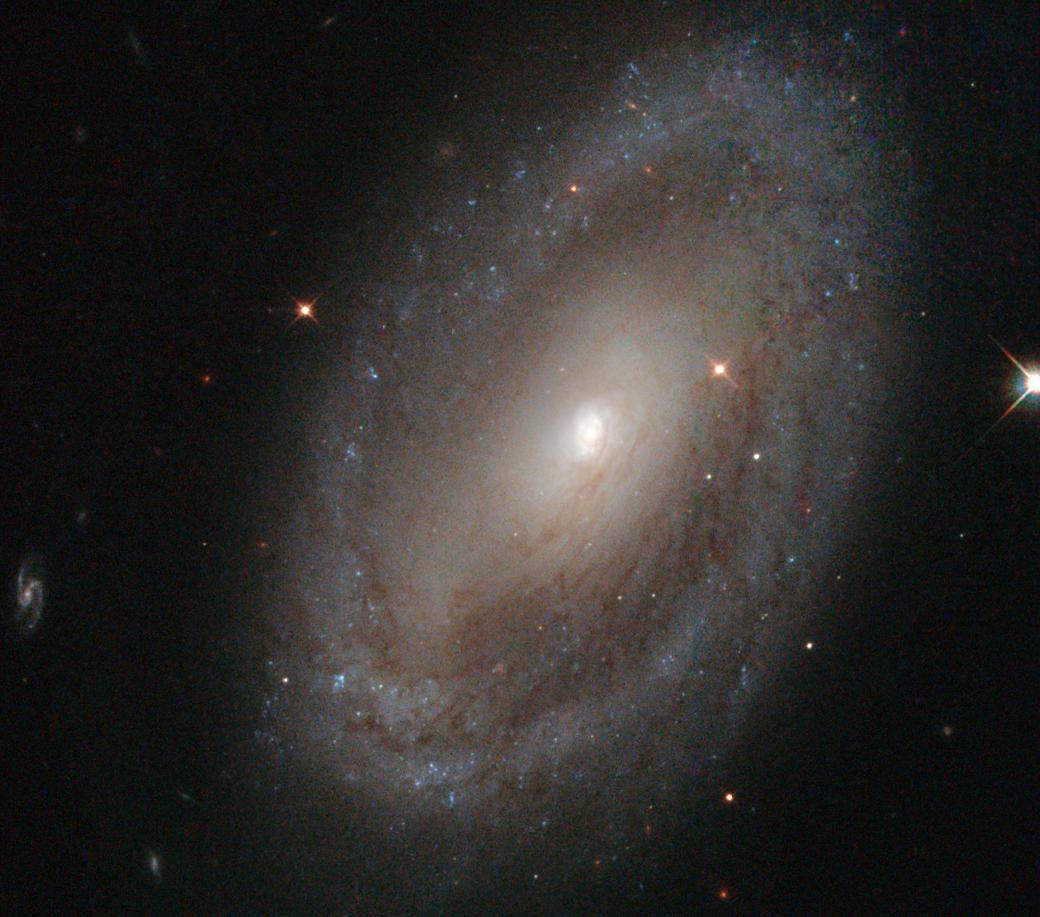

Stalking our celebrity neighbours

This is the spiral galaxy NGC 3185, located some 80 million light-years away from us in the constellation of Leo (The Lion). The image shows the galaxy’s spiral arms, which can be traced from the centre of the galaxy out towards the rim, where they appear to meet a sparkling blue disc.

At the centre of NGC 3185 is a small but very bright nucleus containing a supermassive black hole. Black holes like this one can have masses many thousands of times that of the Sun, and they become active when matter falls towards them. When this happens the black hole lights up, sending away streams of particles and radiation at almost the speed of light.

NGC 3185 is a member of a small, four-galaxy group called Hickson 44, which has a celebrity in its midsts — the group is also home to another spiral galaxy called NGC 3190. NGC 3190 may be very familiar to you; the technology giant Apple Inc. used a blue-tinted image of it as a desktop image for one of its operating systems.

These data were unearthed from the NASA/ESA Hubble Space Telescope Legacy Archive by contestant Judy Schmidt, who entered a version of this image into the Hubble’s Hidden treasures image processing competition.

Credit: ESA/Hubble & NASA Acknowledgement: Judy Schmidt